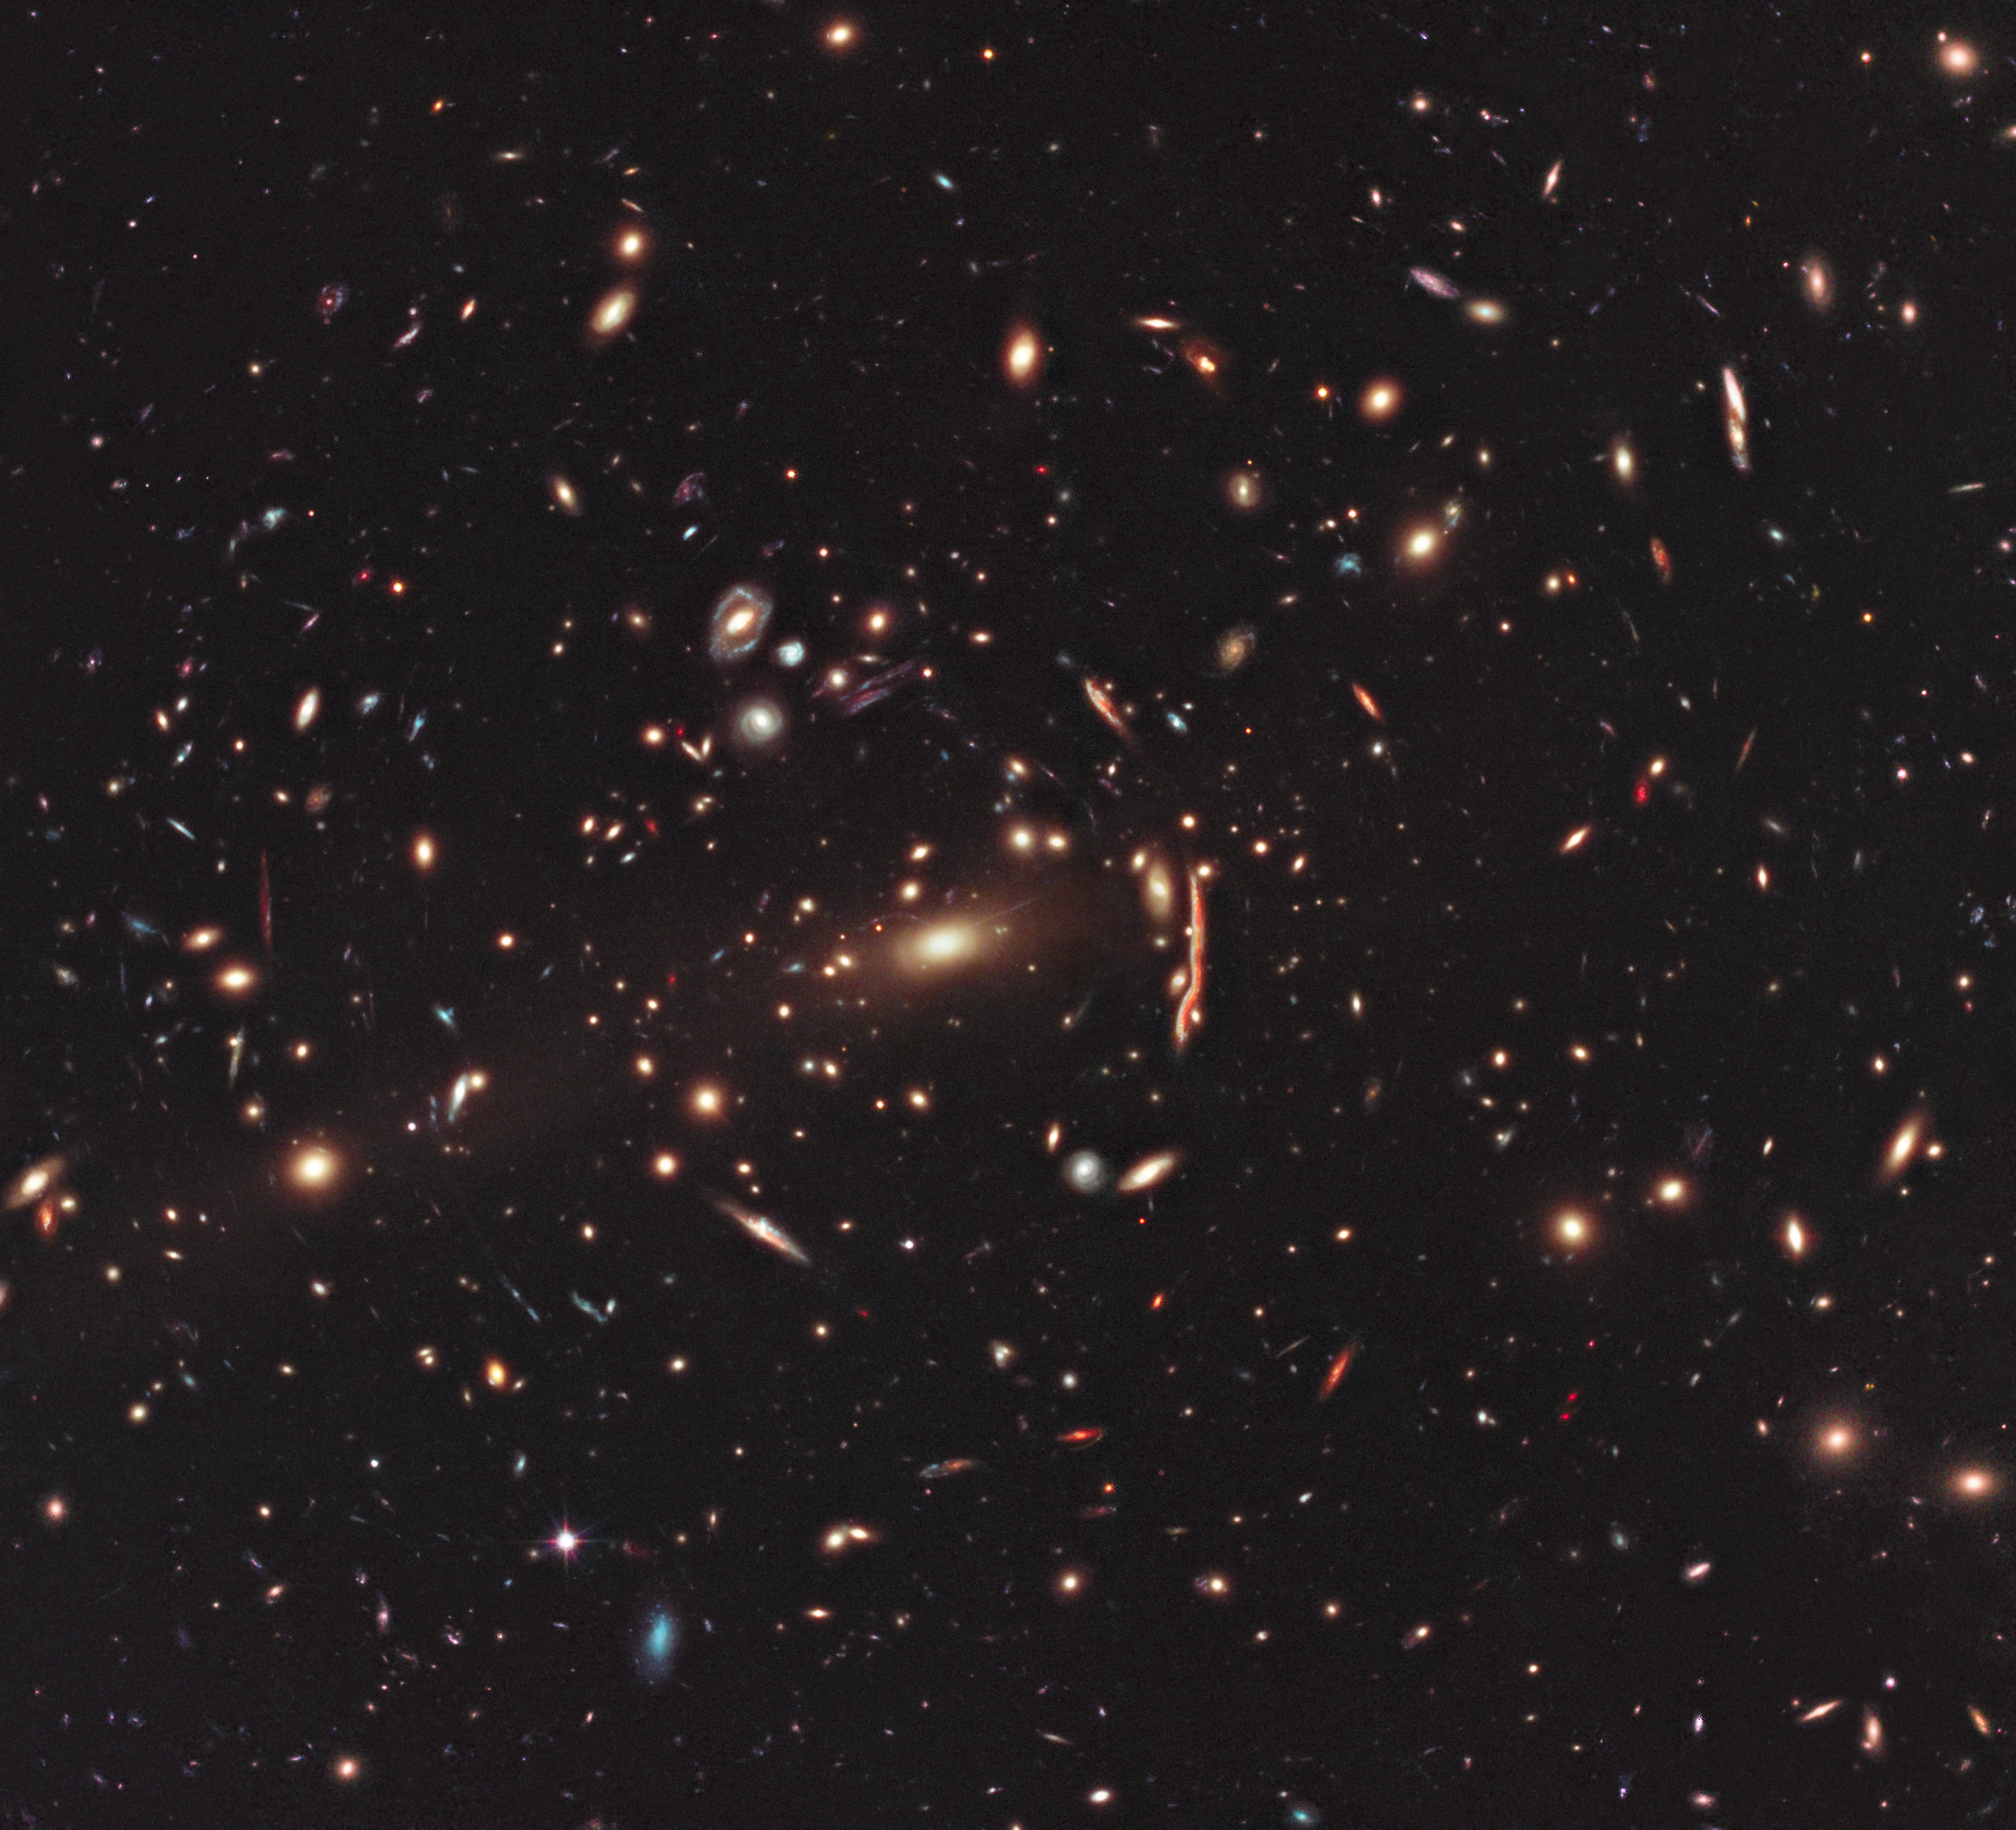

Hubble image of galaxy cluster MACS J1206

This image from the NASA/ESA Hubble Space Telescope shows the galaxy cluster MACS J1206. Galaxy clusters like these have enormous mass, and their gravity is powerful enough to visibly bend the path of light, somewhat like a magnifying glass.

These clusters are useful tools for studying very distant objects, because this lens-like behaviour amplifies the light from faraway galaxies in the background. They also contribute to a range of topics in cosmology, as the precise nature of the lensed images encapsulates information about the properties of spacetime, the expansion of the cosmos and the distribution of dark matter within the cluster.

This is one of 25 clusters being studied as part of the CLASH (Cluster Lensing and Supernova survey with Hubble) programme, a major project to build a library of scientific data on lensing clusters.

Credit: NASA, ESA, M. Postman (STScI) and the CLASH Team